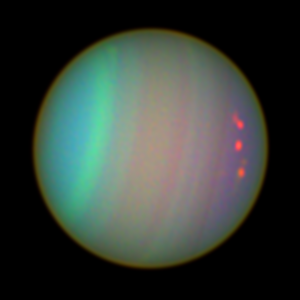

Uranus as Seen with colour Filters

Atmospheric features on Uranus are revealed in images taken with the Space Telescope Imaging Spectrograph and the Advanced Camera for Surveys aboard NASA's Hubble Space Telescope.

Credit: NASA/ESA and Erich Karkoschka, University of Arizona